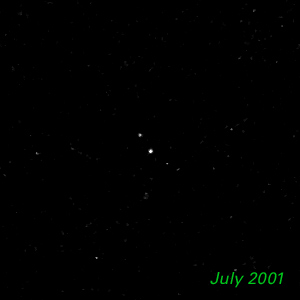

July 2001 - Kuiper Belt Object 1998 WW31

The Hubble Space Telescope is hot on the trail of a puzzling new class of solar system object that might be called a Pluto "mini-me." Together, these objects are 5,000 times less massive than Pluto and Charon. Like Pluto and Charon, these dim and fleeting objects travel in pairs in the frigid, mysterious outer realm of the solar system called the Kuiper Belt, a long-hypothesized "junkyard" of countless icy bodies left over from the solar system's formation. A total of seven binary Kuiper Belt objects have been seen so far by Hubble and ground-based observatories. Among them is a pair called 1998 WW31, which the Hubble telescope studied in detail.

Credit: NASA & ESA